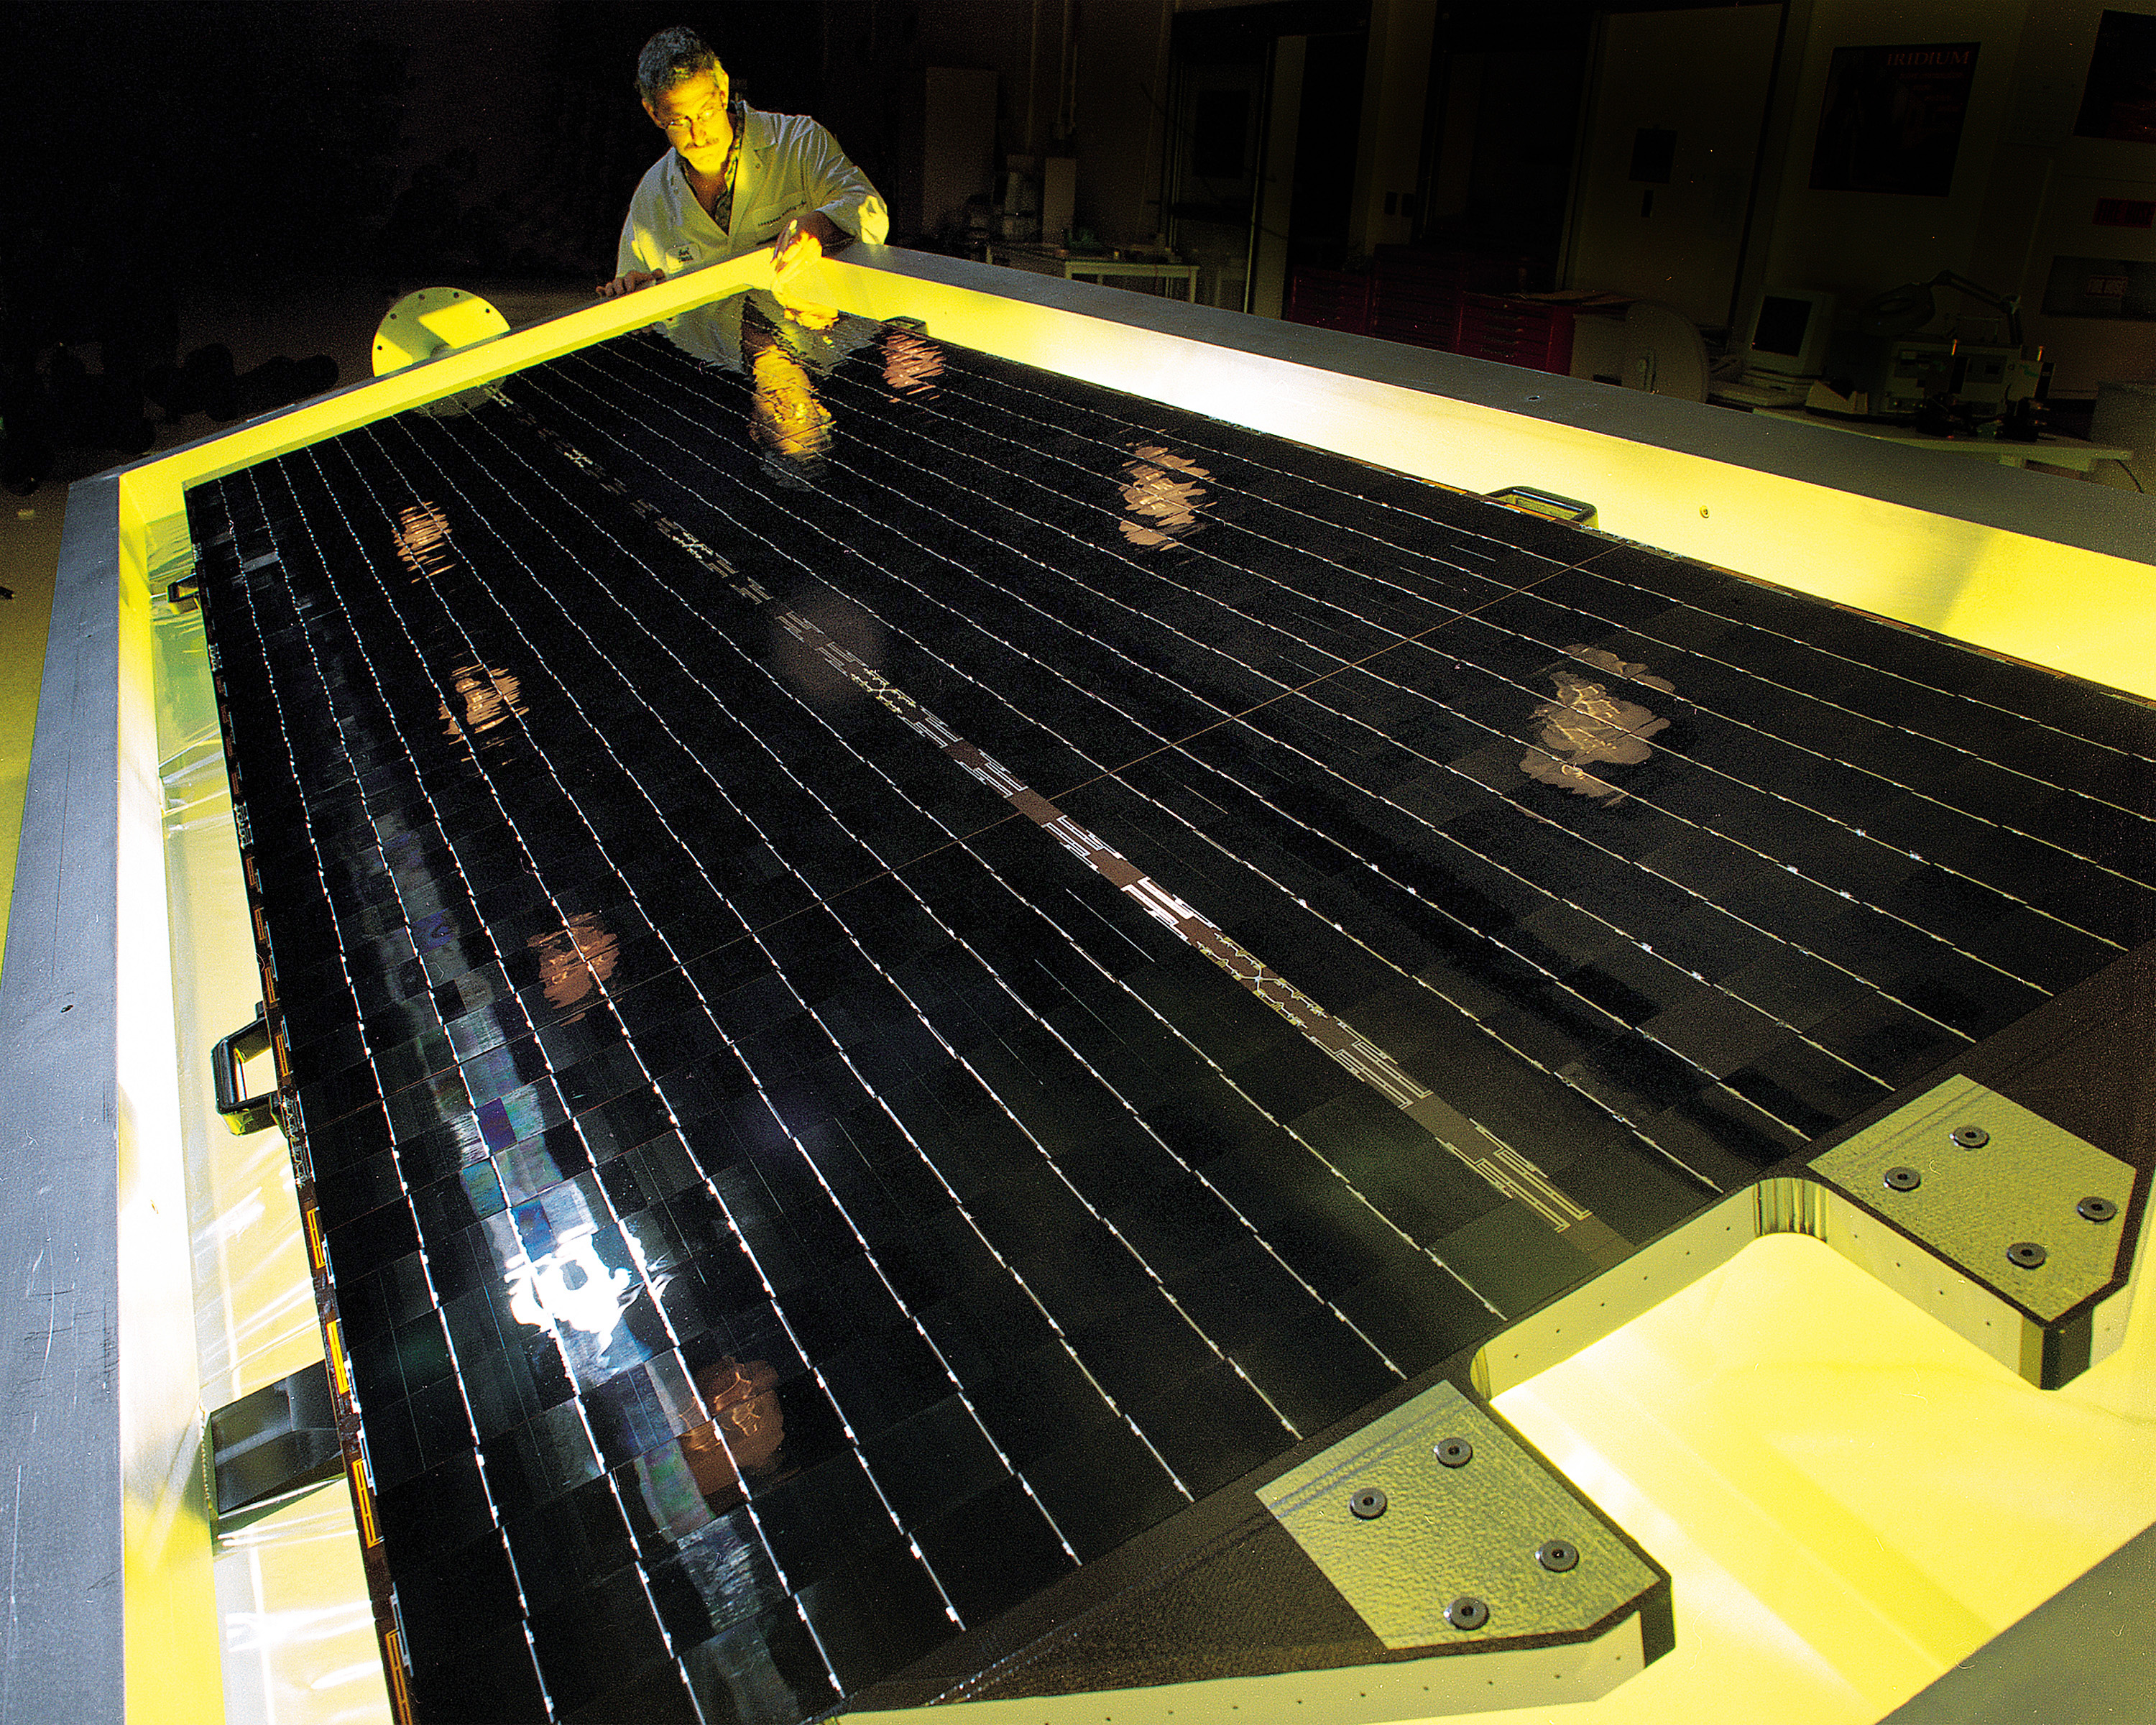

HST Arrays

These solar arrays are going to be installed during Servicing Mission 3B.

Credit: NASA/ESA